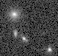

Galaxies: snapshots in time

Single images from the Galaxies: Snapshots in Time collage.

Credit: NASA & ESA